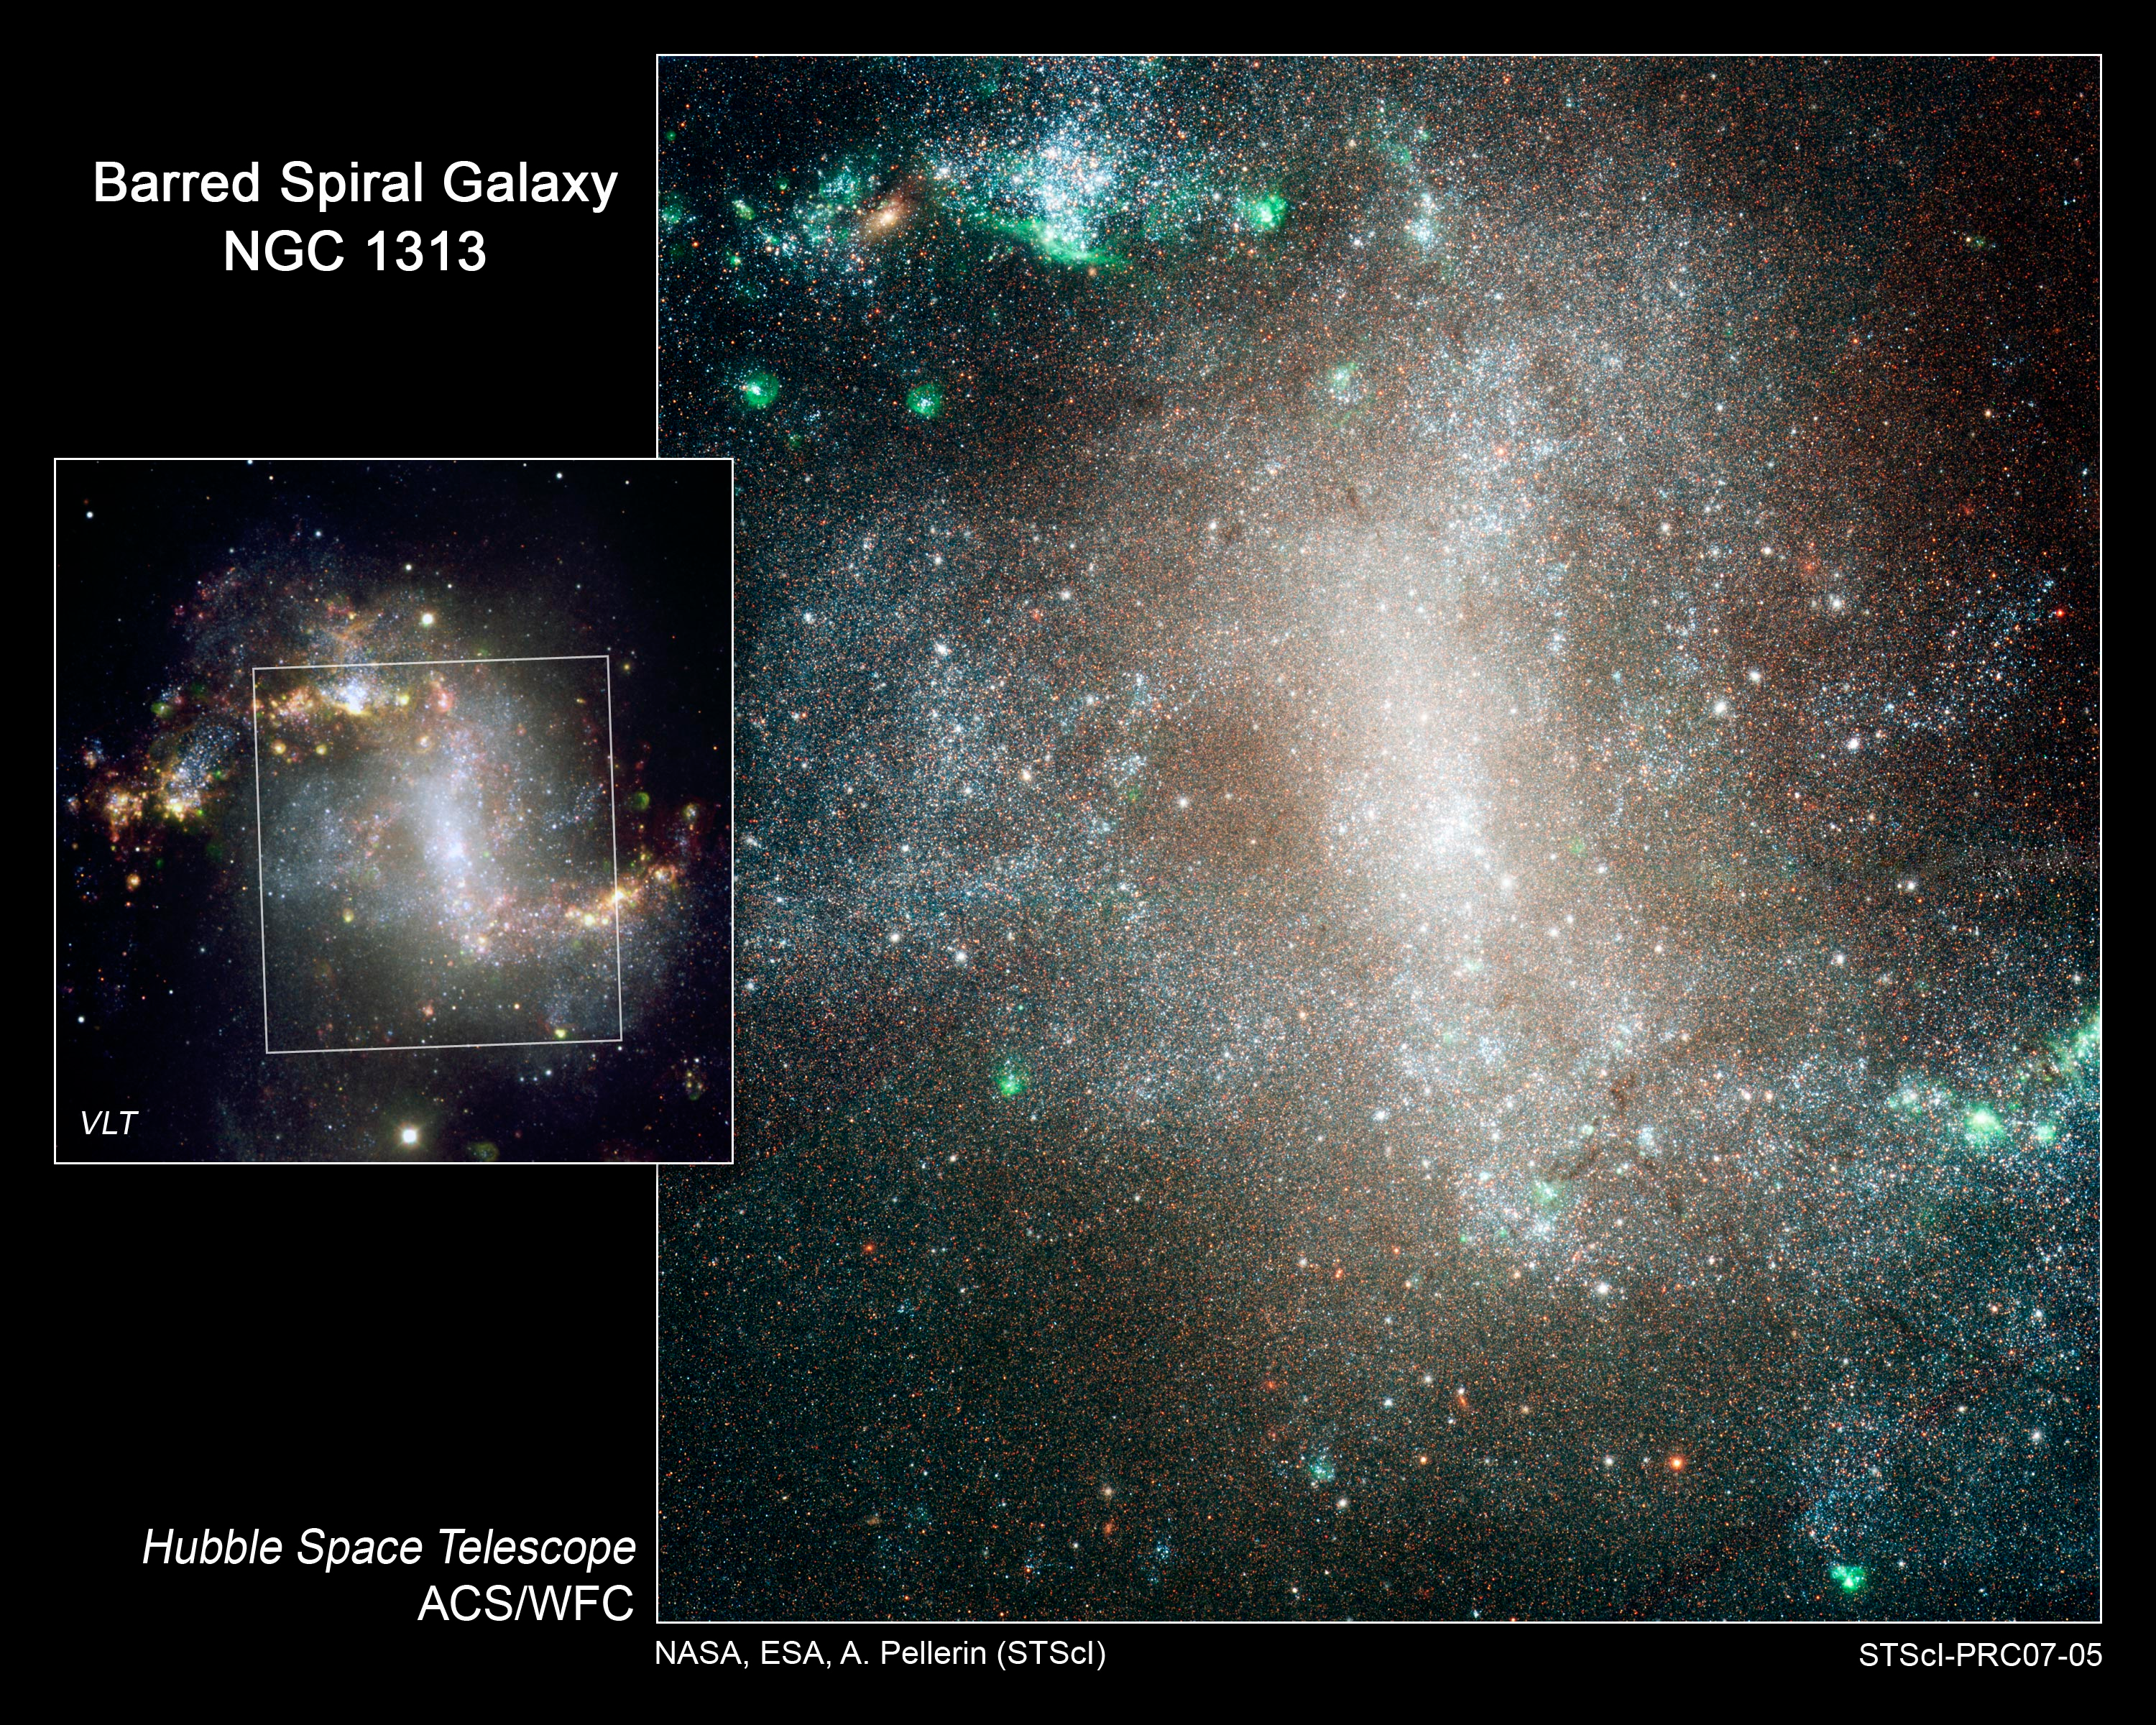

Stellar "Infant Mortality" in Spiral Galaxy NGC 1313

Views of the barred spiral galaxy NGC 1313. Hubble was used to resolve stars within the galaxy to do a census of various classes of stars distributed across the galaxy. The observations show that hot blue stars (of class B) are widely scattered across the galaxy. This is evidence of "infant mortality" in which the young, so-called open clusters where stars are born, quickly became gravitationally "unglued" and scattered their resident stars into the galaxy. NGC 1313 is 50,000 light-years across and lies 14 million light-years away in the southern constellation of Reticulum.

Credit: Left: H. Boffin (FORS/VLT/ESO). Right: NASA, ESA and A. Pellerin (STScI)